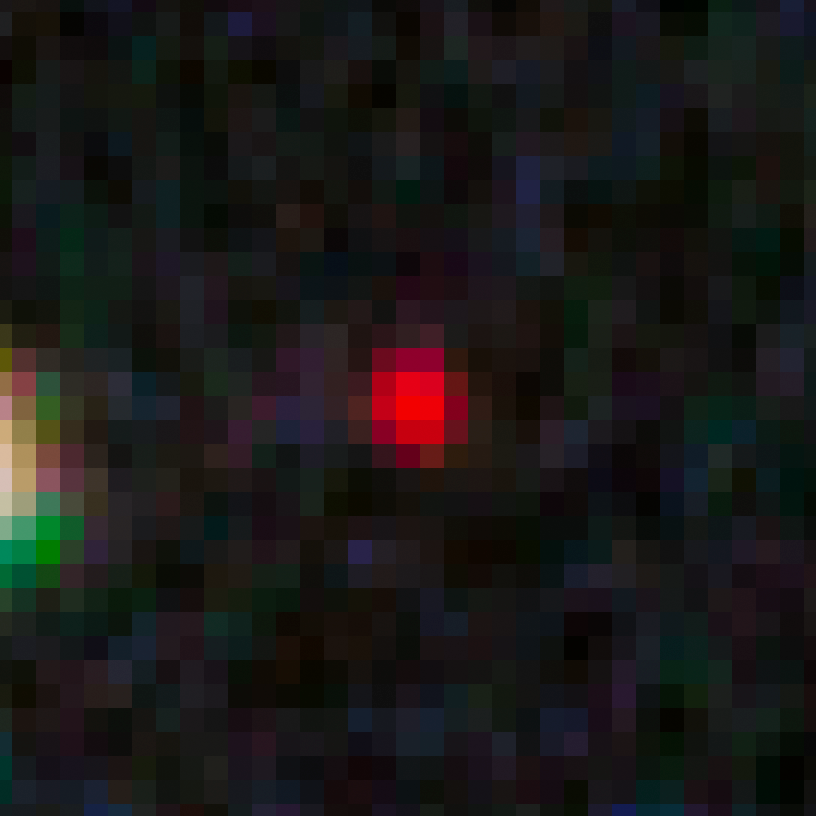

GN-z10-1 in the GOODS-N field

This image shows an ultra-bright young galaxy known as GN-z10-1, discovered in the Hubble GOODS North field (Great Observatories Origins Deep Survey).

Researchers found four unusually red objects, including GN-z10-1, that appear as they existed just 500 million years after the Big Bang. They appear red because their light has been stretched to longer infrared wavelengths by the expansion of the Universe. These extremely compact and bright galaxies present a puzzle to researchers because they are much more luminous than anything previously seen at such an early epoch. The young galaxies are bright because they are forming stars at a much faster rate than for other galaxies found at such early times.

Credit: NASA, ESA, G. Illingworth (University of California, Santa Cruz), P. Oesch (University of California, Santa Cruz; Yale University), R. Bouwens and I. Labbé (Leiden University), and the Science Team